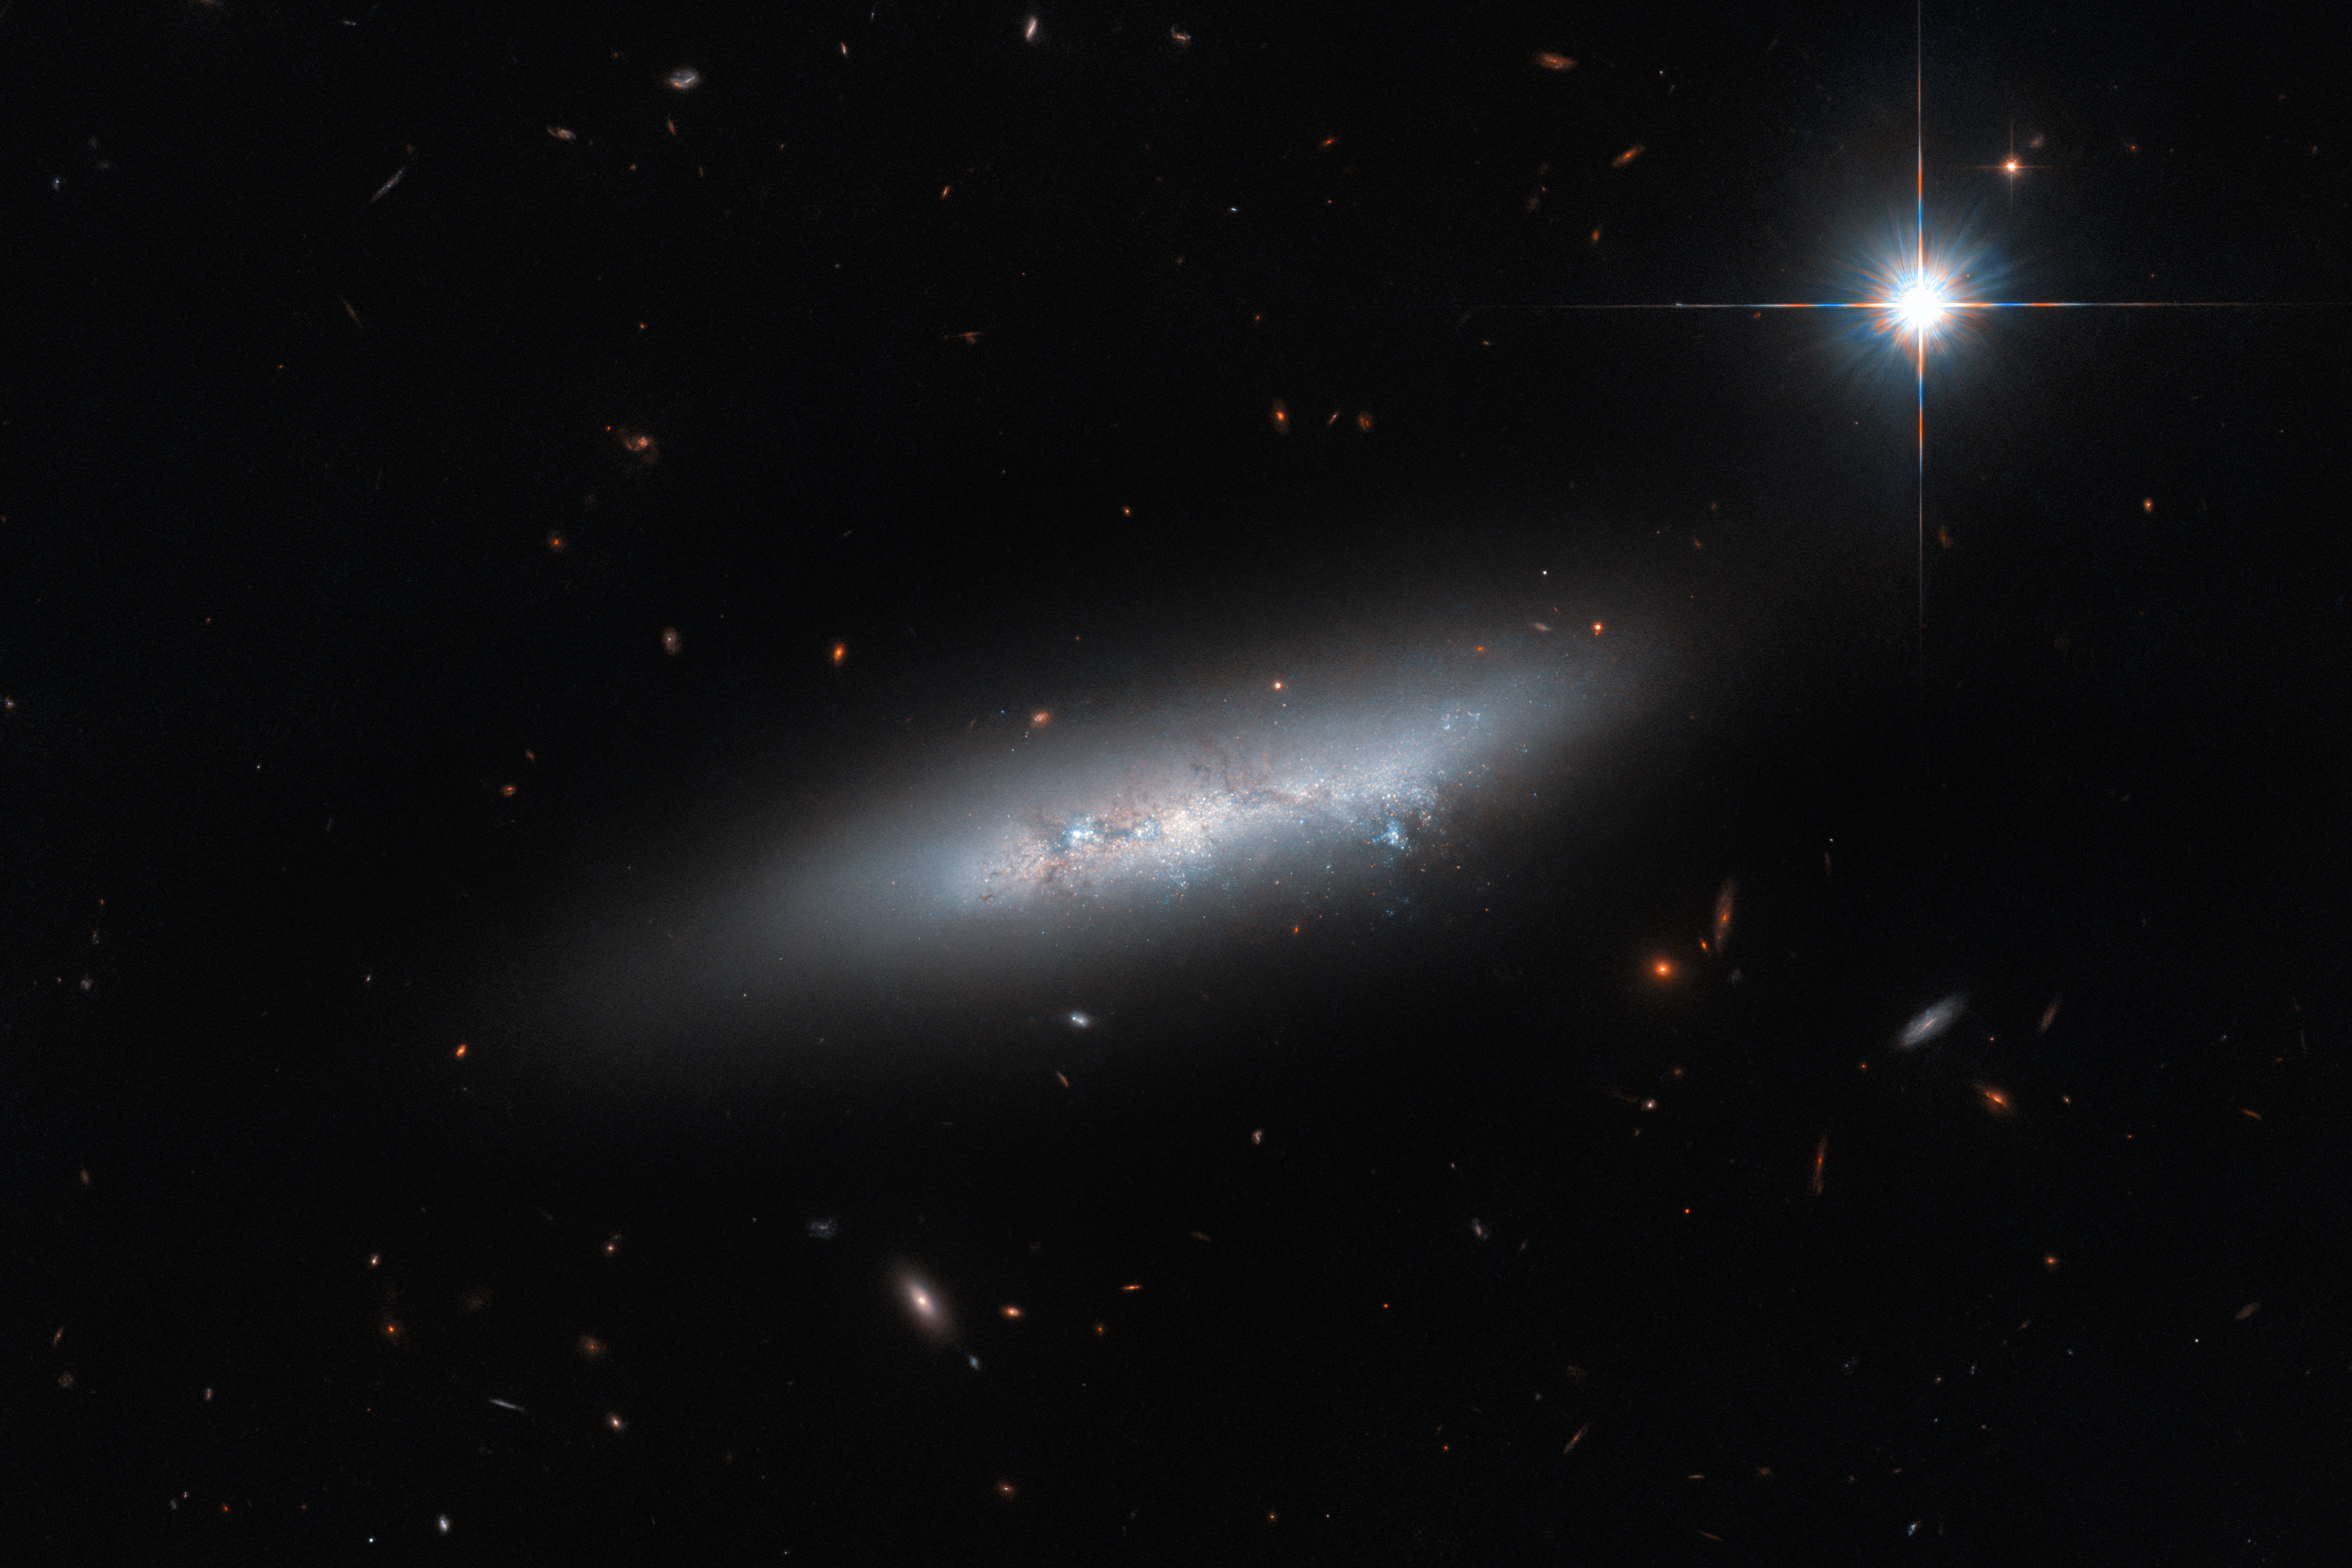

“Late-type” galaxy?

This Hubble Picture of the Week features NGC 2814, an irregular galaxy that lies about 85 million light years from Earth. In this image, which was captured using Hubble’s Advanced Camera for Surveys (ACS), the galaxy appears to be quite isolated: visually, it looks a little like a loose stroke of bright paint across a dark background. However, looks can be deceiving. NGC 2814 actually has three close (in astronomical terms) galactic neighbours: a side-on spiral galaxy known as NGC 2820; an irregular galaxy named IC 2458; and a face-on non-barred spiral galaxy called NGC 2805. Collectively, the four galaxies make up a galaxy group known as Holmberg 124. In some literature these galaxies are referred to as a group of ‘late-type galaxies’.

The terminology ‘late-type’ refers to spiral and irregular galaxies, whilst ‘early-type’ refers to elliptical galaxies. This rather confusing terminology has led to a common misconception within the astronomy community. It is still quite widely believed that Edwin Hubble inaccurately thought that elliptical galaxies were the evolutionary precursors to spiral and irregular galaxies, and that that is the reason why ellipticals are classed as ‘early-type’ and spirals and irregulars are classed as ‘late-type’. This misconception is due to the Hubble ‘tuning fork’ of galactic classification, which visually shows galaxy types proceeding from elliptical to spiral, in a sequence that could easily be interpreted as a temporal evolution. However, Hubble actually adopted the terms ‘early-type’ and ‘late-type’ from much older astronomical terminology for stellar classifications, and did not mean to state that ellipticals were literally evolutionary precursors to spiral and irregular galaxies. In fact, he explicitly said in his 1927 paper that ‘the nomenclature … [early and late] … refers to position in the sequence, and temporal connotations are made at one’s peril’.

Despite Hubble himself being quite emphatic on this topic, the misunderstanding persists almost a hundred years later, and perhaps provides an instructive example of why it is helpful to classify things with easy-to-interpret terminology from the get-go!

Credit: ESA/Hubble & NASA, C. Kilpatrick